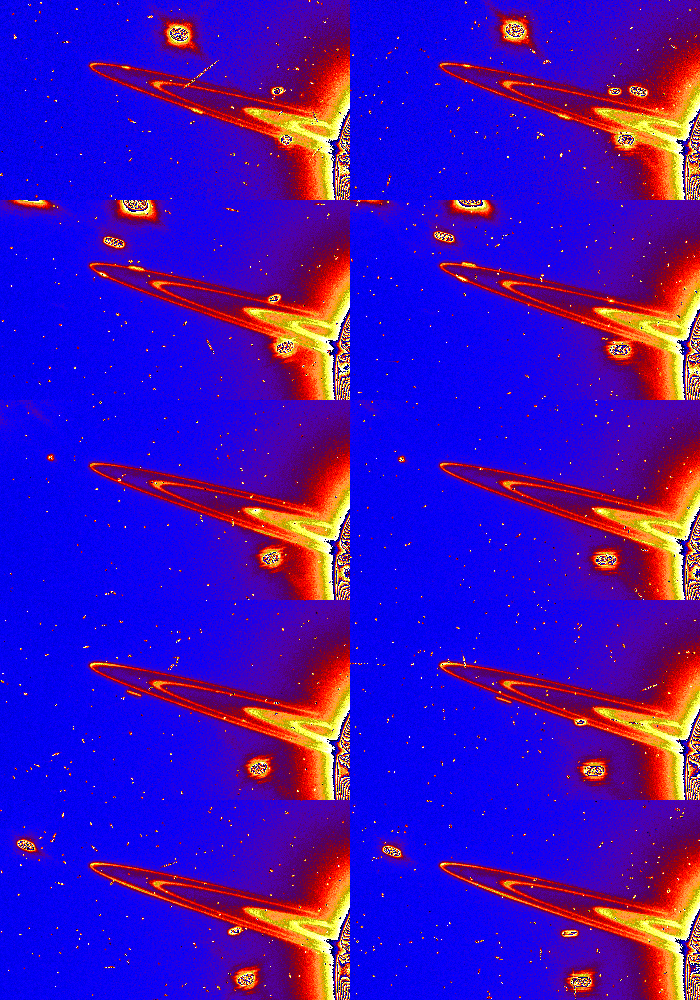

Moons around Saturn

This series of 10 Hubble Space Telescope images captures several small moons orbiting Saturn. Hubble snapped the five pairs of images while the Earth was just above the ring plane and the Sun below it. The telescope captured a pair of images every 97 minutes as it circled the Earth. Moving out from Saturn, the visible rings are: the broad C Ring, the Cassini Division, and the narrow F Ring. For detailed descriptions of each frame please click the Caption link below.

Credit: Phil Nicholson (Cornell University) and NASA/ESA